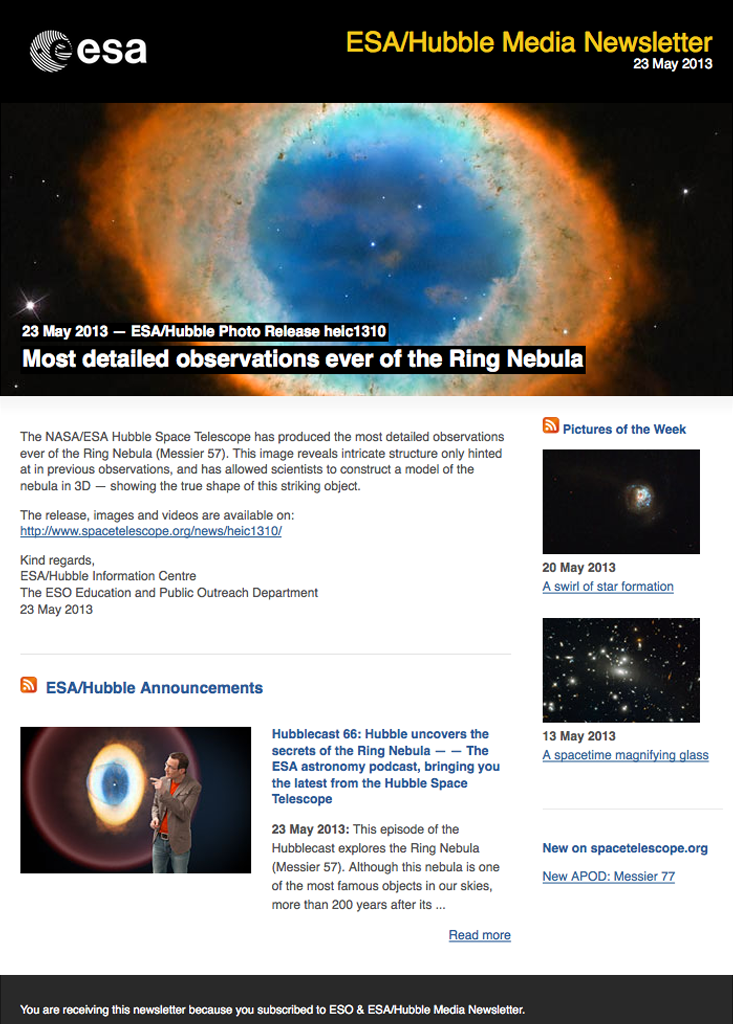

Hubble media newsletter — 23 May 2013

Screenshot of the Hubble Media Newsletter, 23 May 2013. Read more about the Hubble Newsletters.

Credit: NASA & ESA